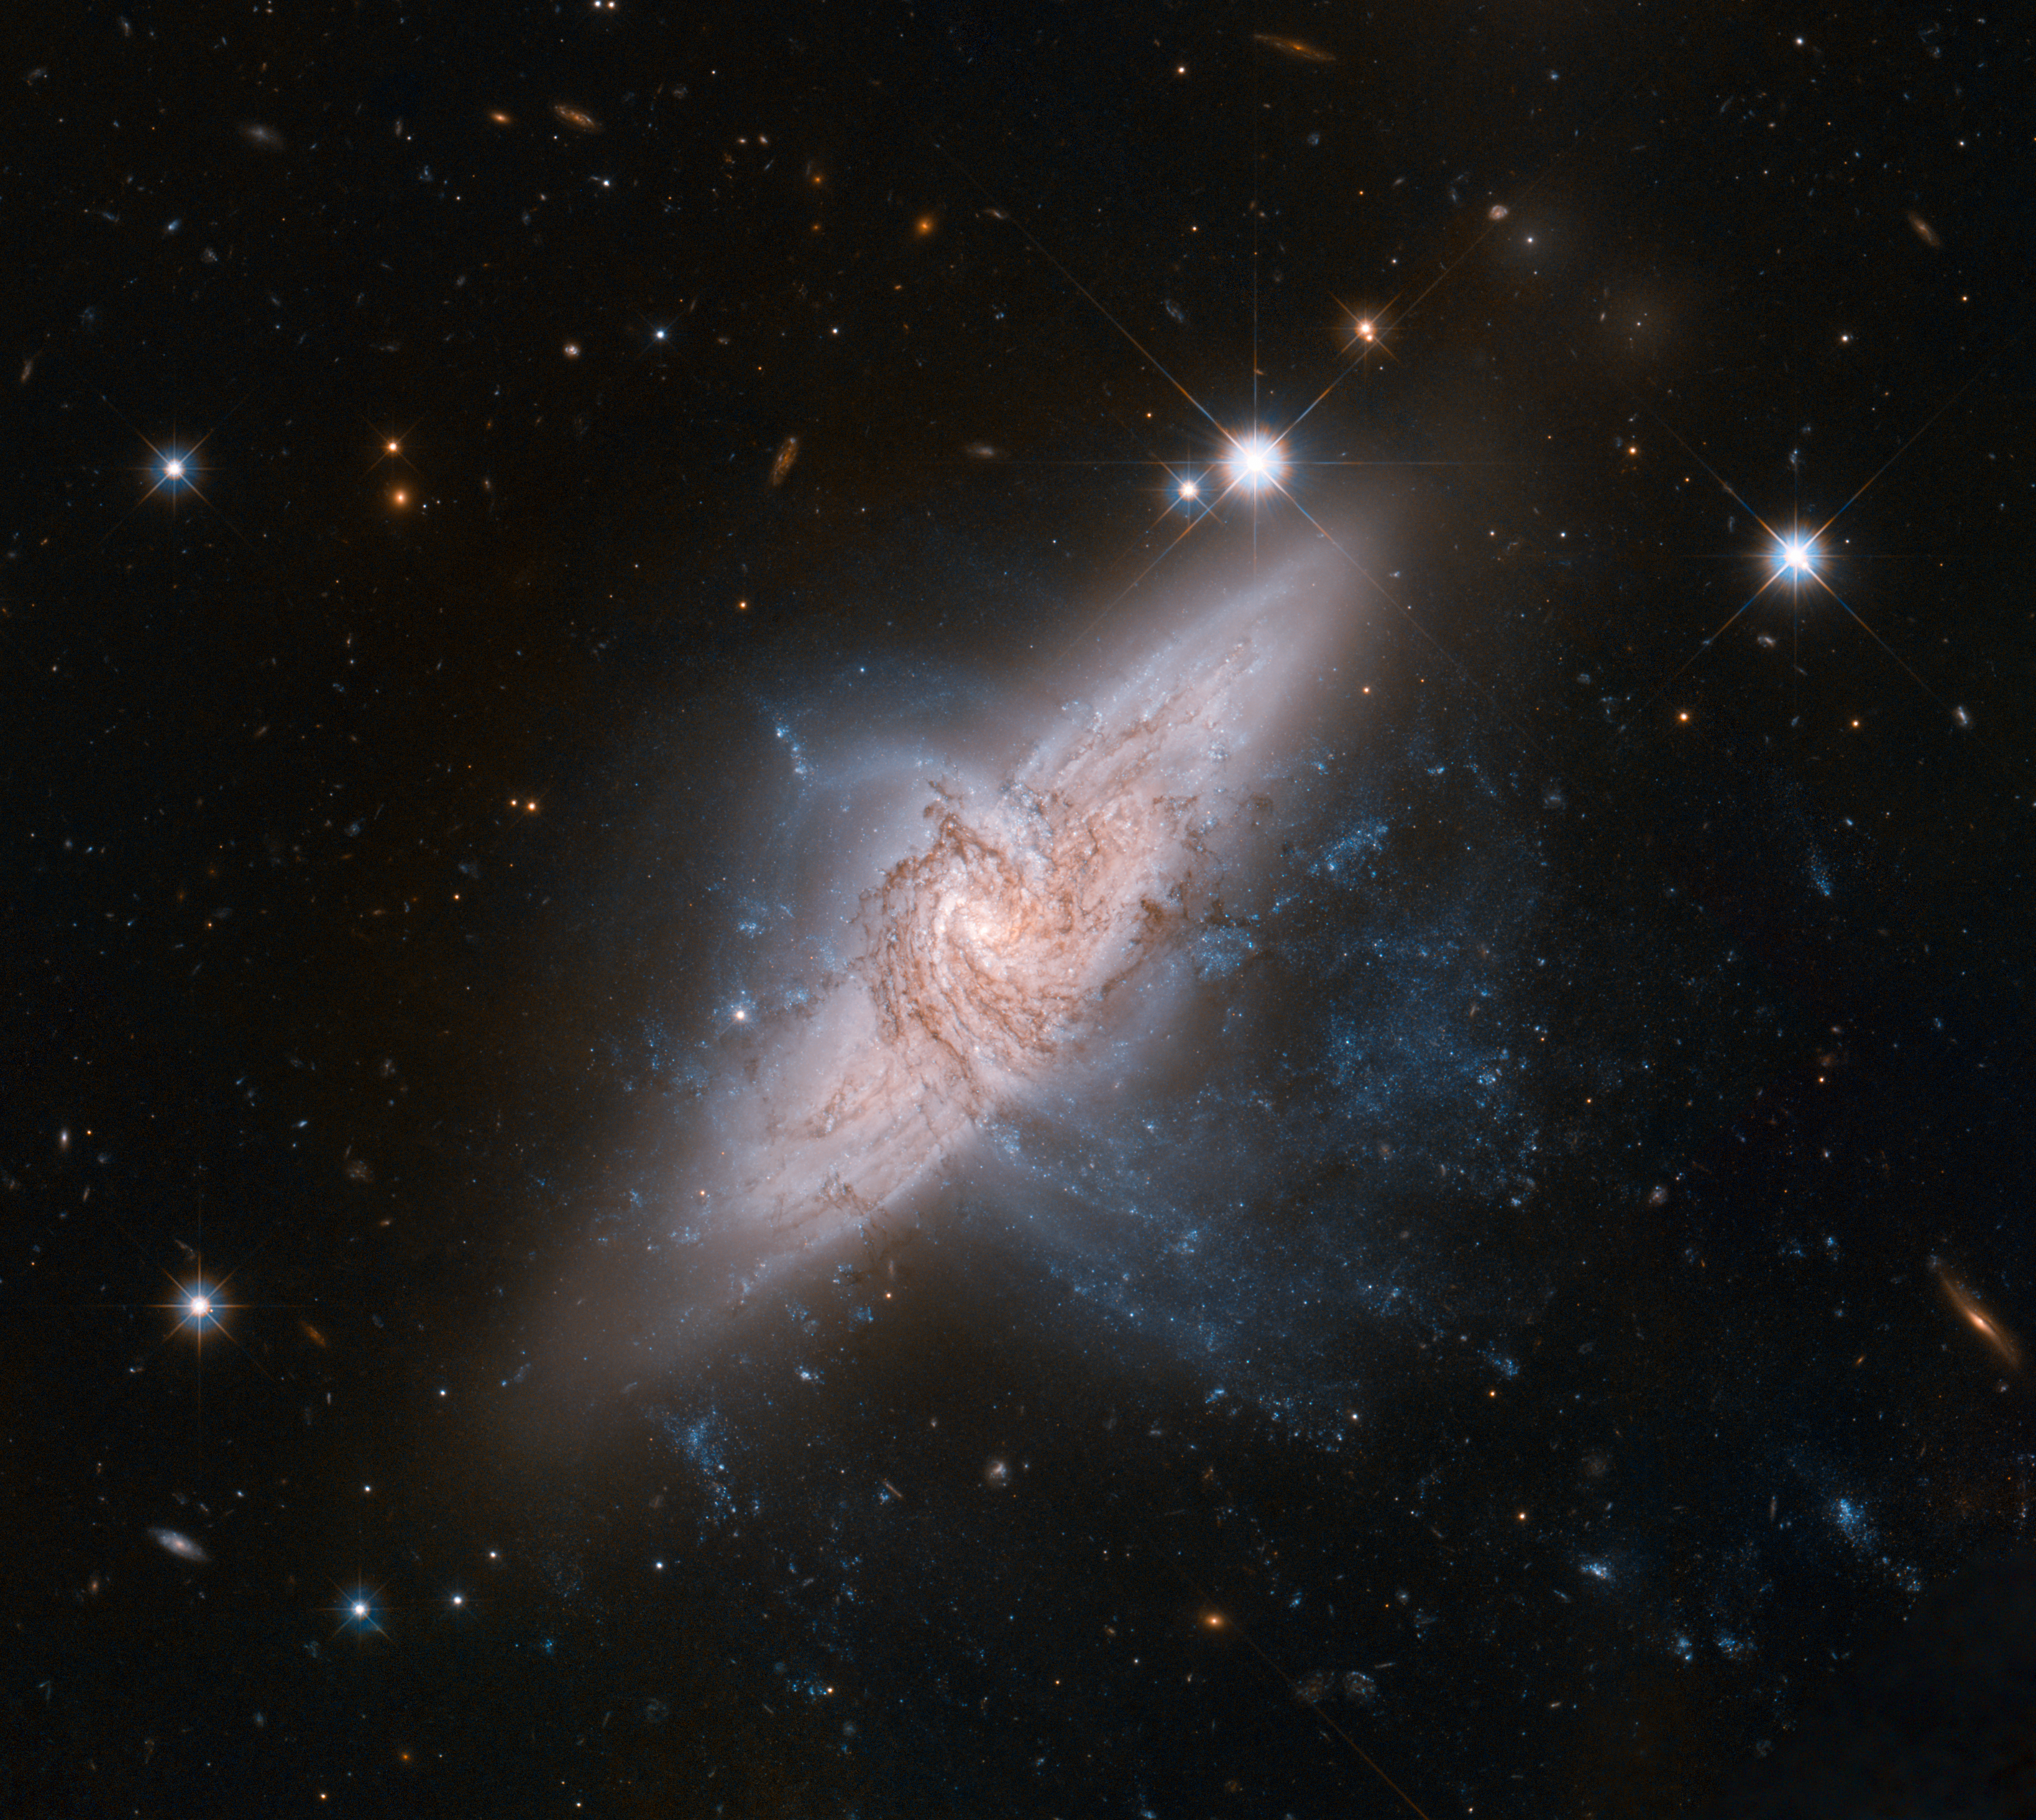

Hubble view of NGC 3314

The NASA/ESA Hubble Space Telescope has produced an incredibly detailed image of a pair of overlapping galaxies called NGC 3314. While the two galaxies look as if they are in the midst of a collision, this is in fact a trick of perspective: the two are in chance alignment from our vantage point.

Credit: NASA, ESA, the Hubble Heritage (STScI/AURA)-ESA/Hubble Collaboration, and W. Keel (University of Alabama)